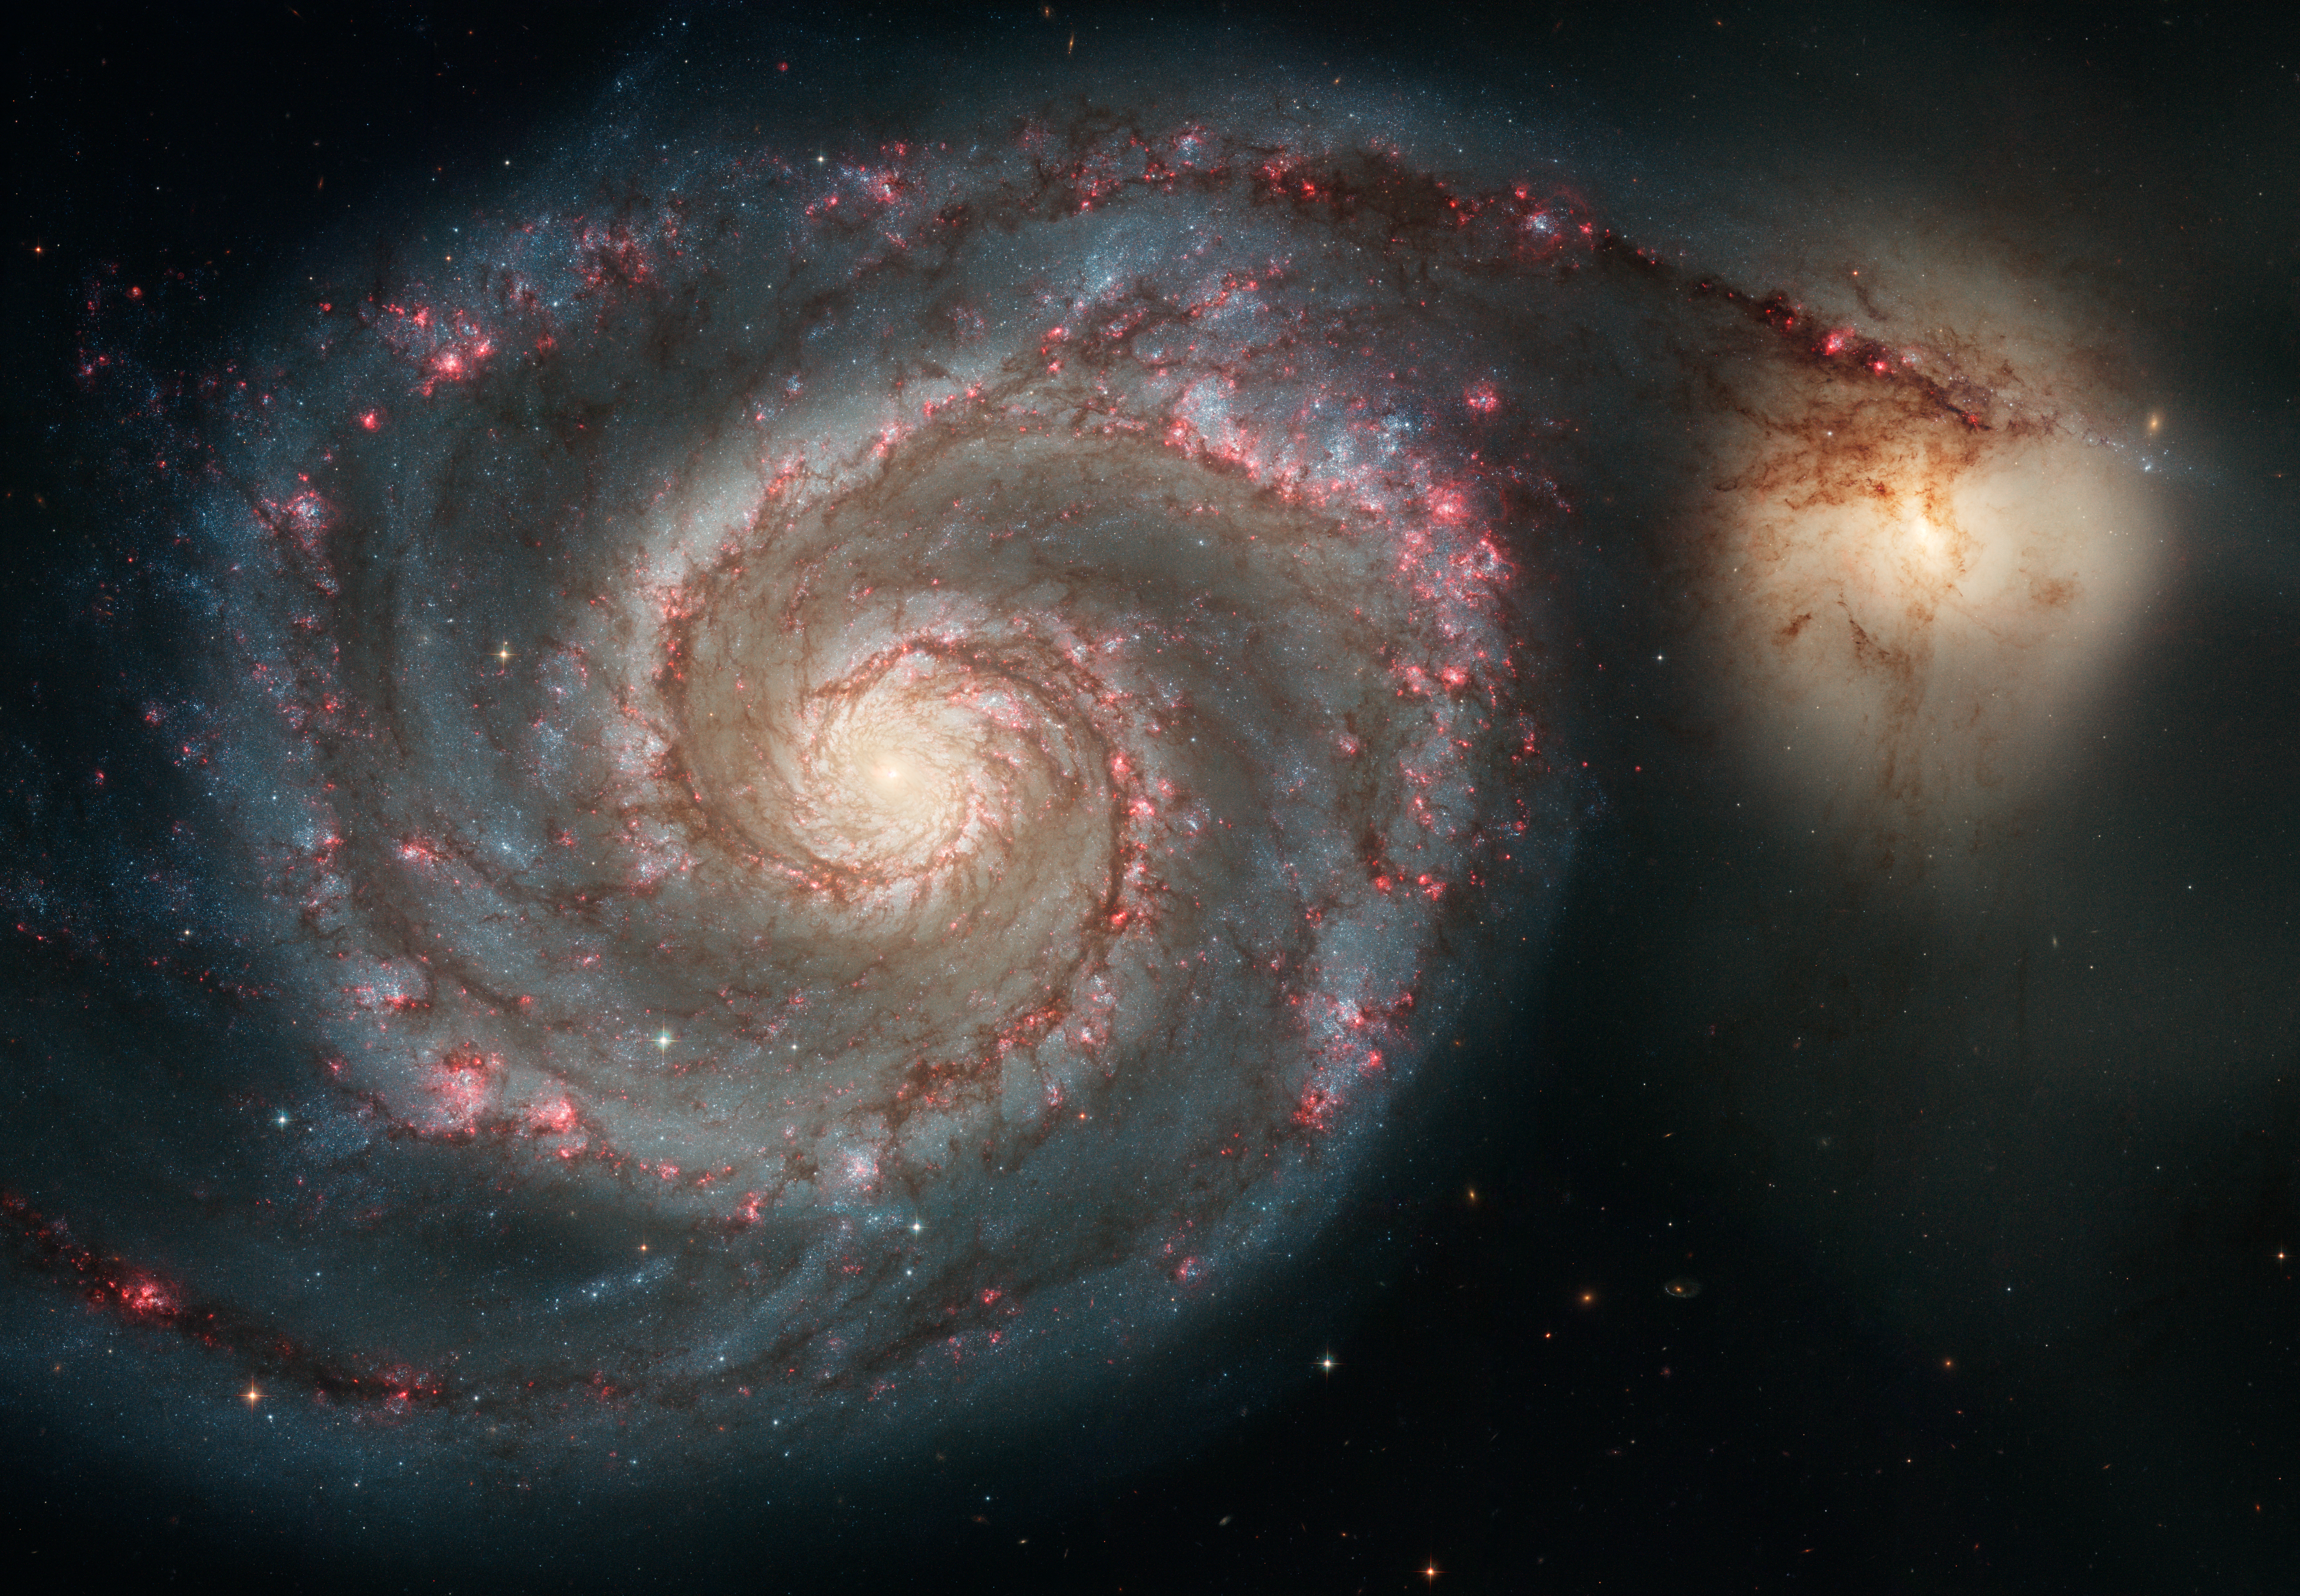

Out of this whirl: The Whirlpool Galaxy (M51) and companion galaxy

The graceful, winding arms of the majestic spiral galaxy M51 (NGC 5194) appear like a grand spiral staircase sweeping through space. They are actually long lanes of stars and gas laced with dust.

This sharpest-ever image, taken in January 2005 with the Advanced Camera for Surveys aboard the NASA/ESA Hubble Space Telescope, illustrates a spiral galaxy's grand design, from its curving spiral arms, where young stars reside, to its yellowish central core, a home of older stars. The galaxy is nicknamed the Whirlpool because of its swirling structure.

The Whirlpool's most striking feature is its two curving arms, a hallmark of so-called grand-design spiral galaxies. Many spiral galaxies possess numerous, loosely shaped arms that make their spiral structure less pronounced. These arms serve an important purpose in spiral galaxies. They are star-formation factories, compressing hydrogen gas and creating clusters of new stars. In the Whirlpool, the assembly line begins with the dark clouds of gas on the inner edge, then moves to bright pink star-forming regions, and ends with the brilliant blue star clusters along the outer edge.

Some astronomers believe that the Whirlpool's arms are so prominent because of the effects of a close encounter with NGC 5195, the small, yellowish galaxy at the outermost tip of one of the Whirlpool's arms. At first glance, the compact galaxy appears to be tugging on the arm. Hubble's clear view, however, shows that NGC 5195 is passing behind the Whirlpool. The small galaxy has been gliding past the Whirlpool for hundreds of millions of years.

As NGC 5195 drifts by, its gravitational muscle pumps up waves within the Whirlpool's pancake-shaped disk. The waves are like ripples in a pond generated when a rock is thrown in the water. When the waves pass through orbiting gas clouds within the disk, they squeeze the gaseous material along each arm's inner edge. The dark dusty material looks like gathering storm clouds. These dense clouds collapse, creating a wake of star birth, as seen in the bright pink star-forming regions. The largest stars eventually sweep away the dusty cocoons with a torrent of radiation, hurricane-like stellar winds, and shock waves from supernova blasts. Bright blue star clusters emerge from the mayhem, illuminating the Whirlpool's arms like city streetlights.

The Whirlpool is one of astronomy's galactic darlings. Located approximately 25 million light-years away in the constellation Canes Venatici (the Hunting Dogs), the Whirlpool's beautiful face-on view and closeness to Earth allow astronomers to study a classic spiral galaxy's structure and star-forming processes.

Credit: NASA, ESA, S. Beckwith (STScI), and The Hubble Heritage Team (STScI/AURA)